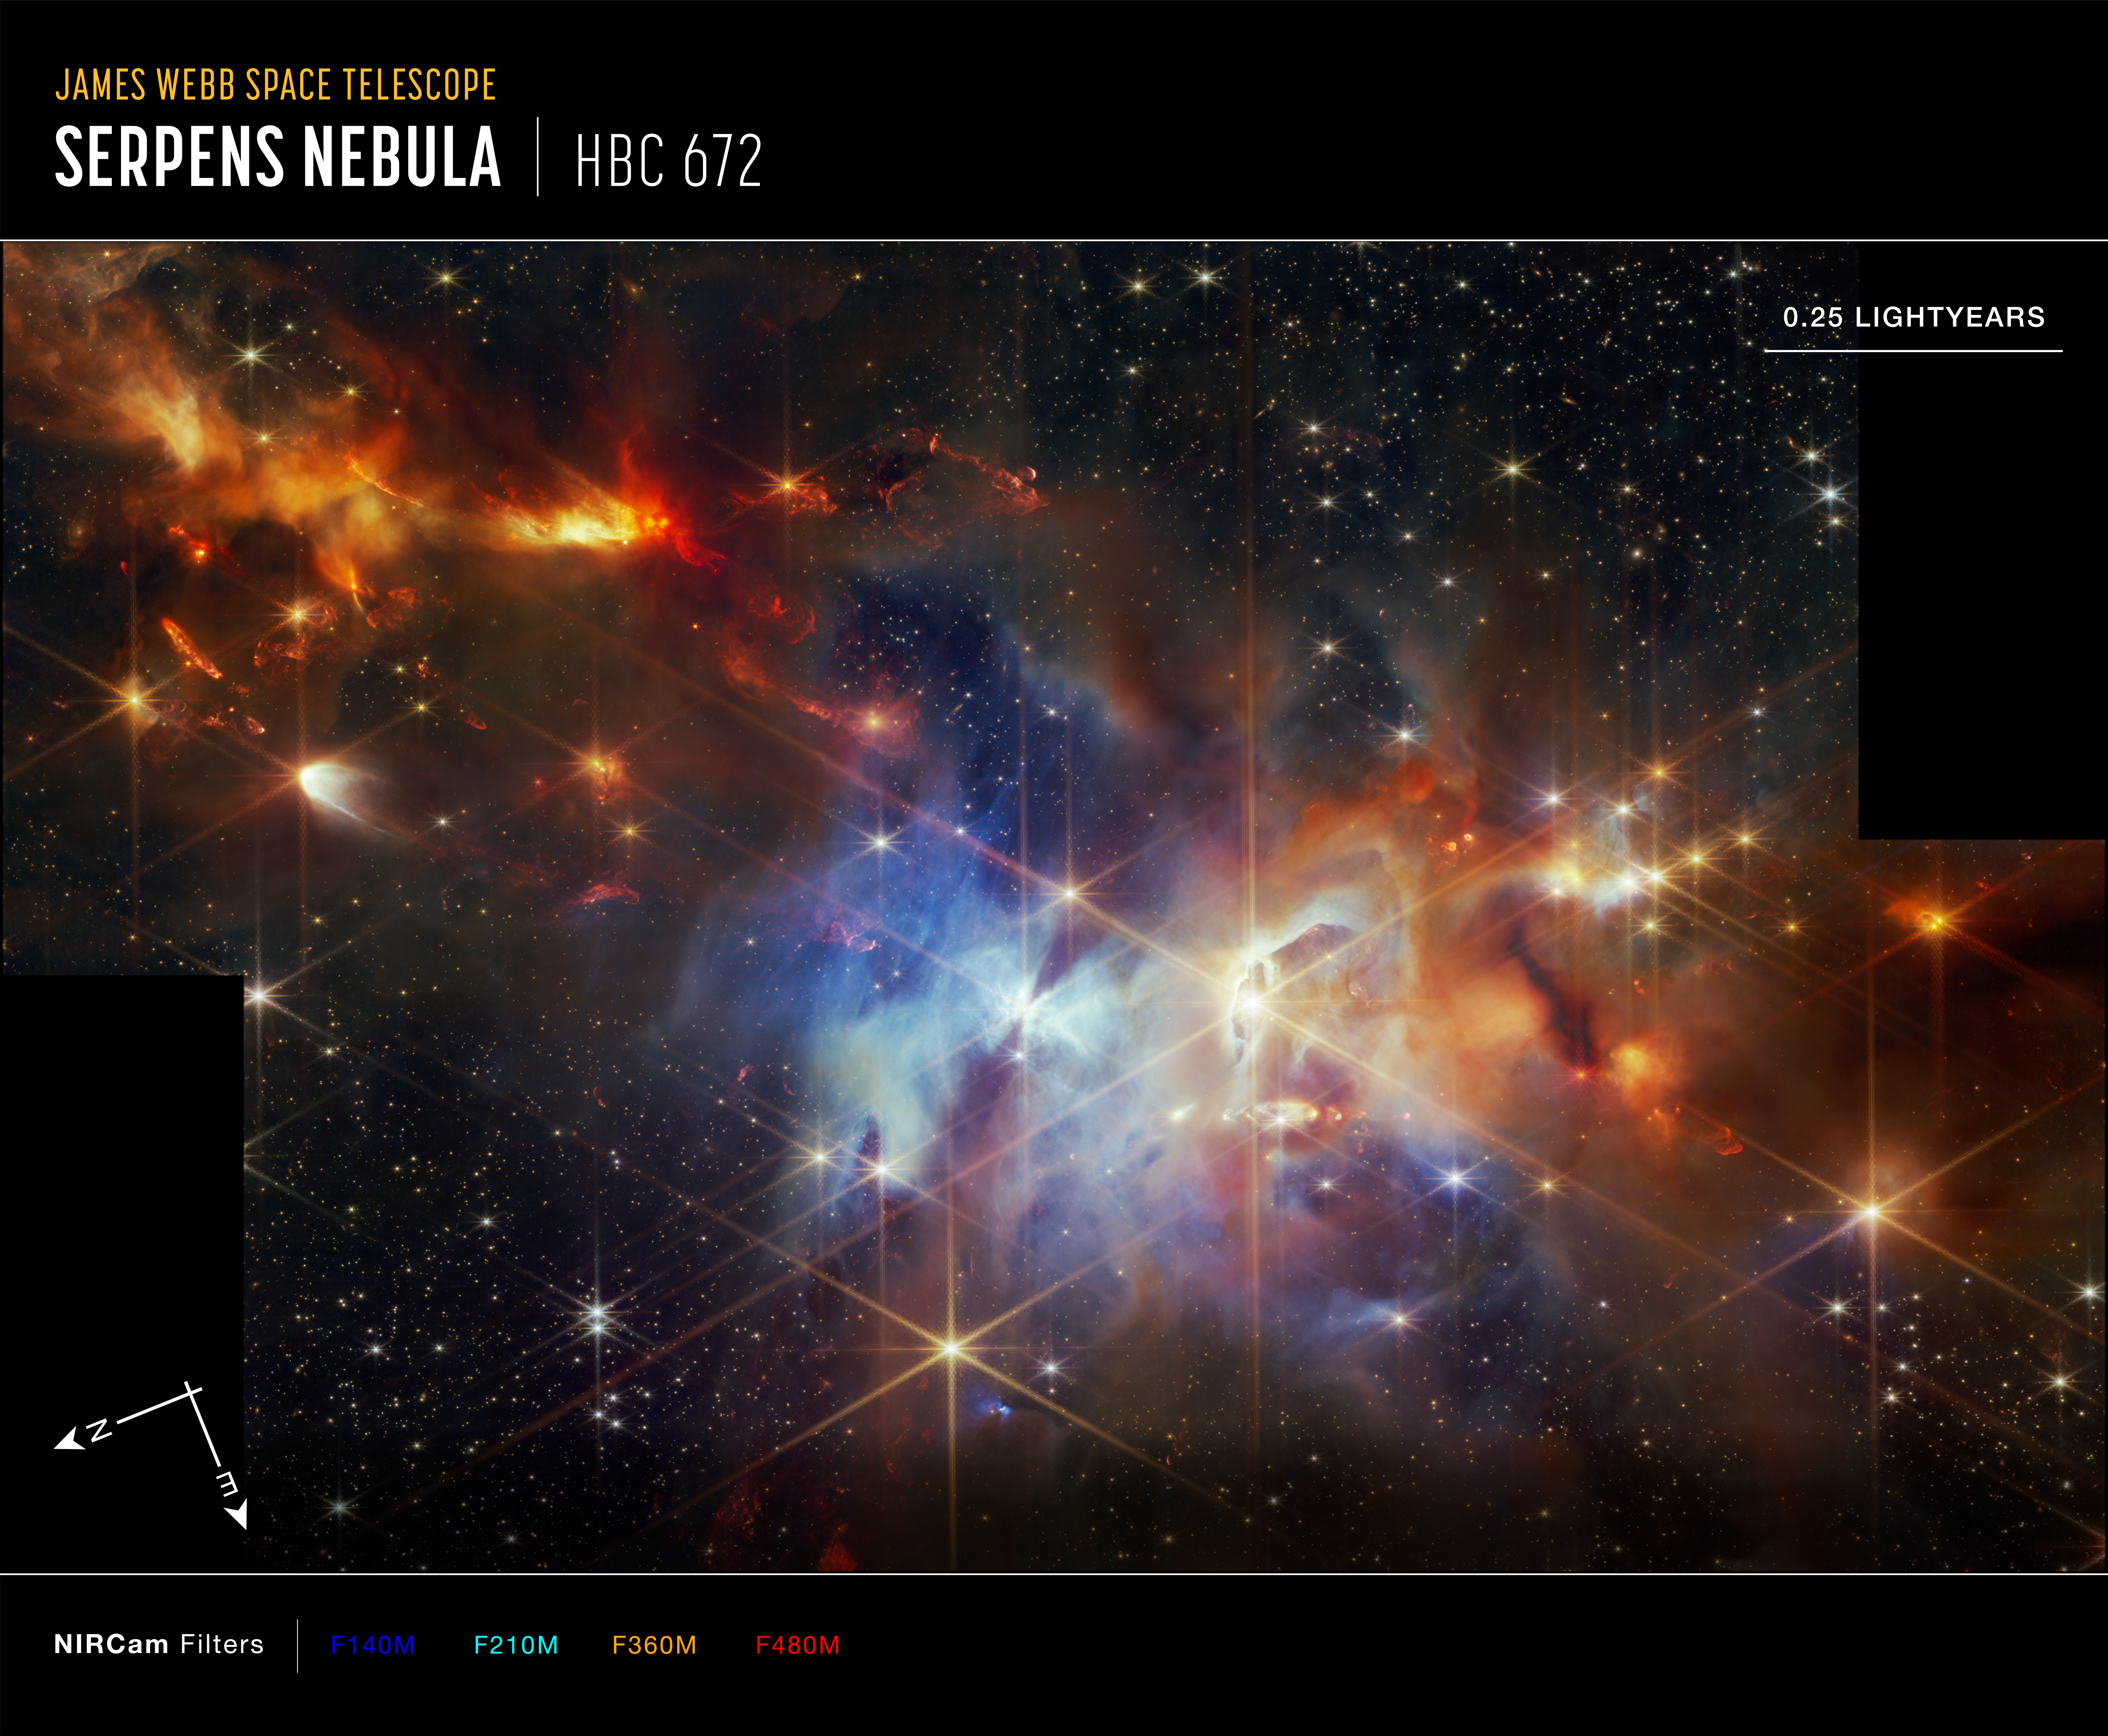

Serpens Nebula (NIRCam compass Image)

This image of the Serpens Nebula, captured by Webb’s Near-InfraRed Camera (NIRCam), shows compass arrows, a scale bar and a colour key for reference.

The north and east compass arrows show the orientation of the image on the sky. Note that the relationship between north and east on the sky (as seen from below) is flipped relative to the direction of arrows on a map of the ground (as seen from above).

The scale bar is labelled in light-years, which is the distance that light travels in one Earth-year. One light-year is equal to about 9.46 trillion kilometres, or 5.88 trillion miles.

This image shows invisible near-infrared wavelengths of light that have been translated into visible-light colours. The colour key shows which NIRCam filters were used when collecting the light. The colour of each filter name is the visible light colour used to represent the infrared light that passes through that filter.

Credit: NASA, ESA, CSA, STScI, K. Pontoppidan (NASA’s Jet Propulsion Laboratory), J. Green (Space Telescope Science Institute)